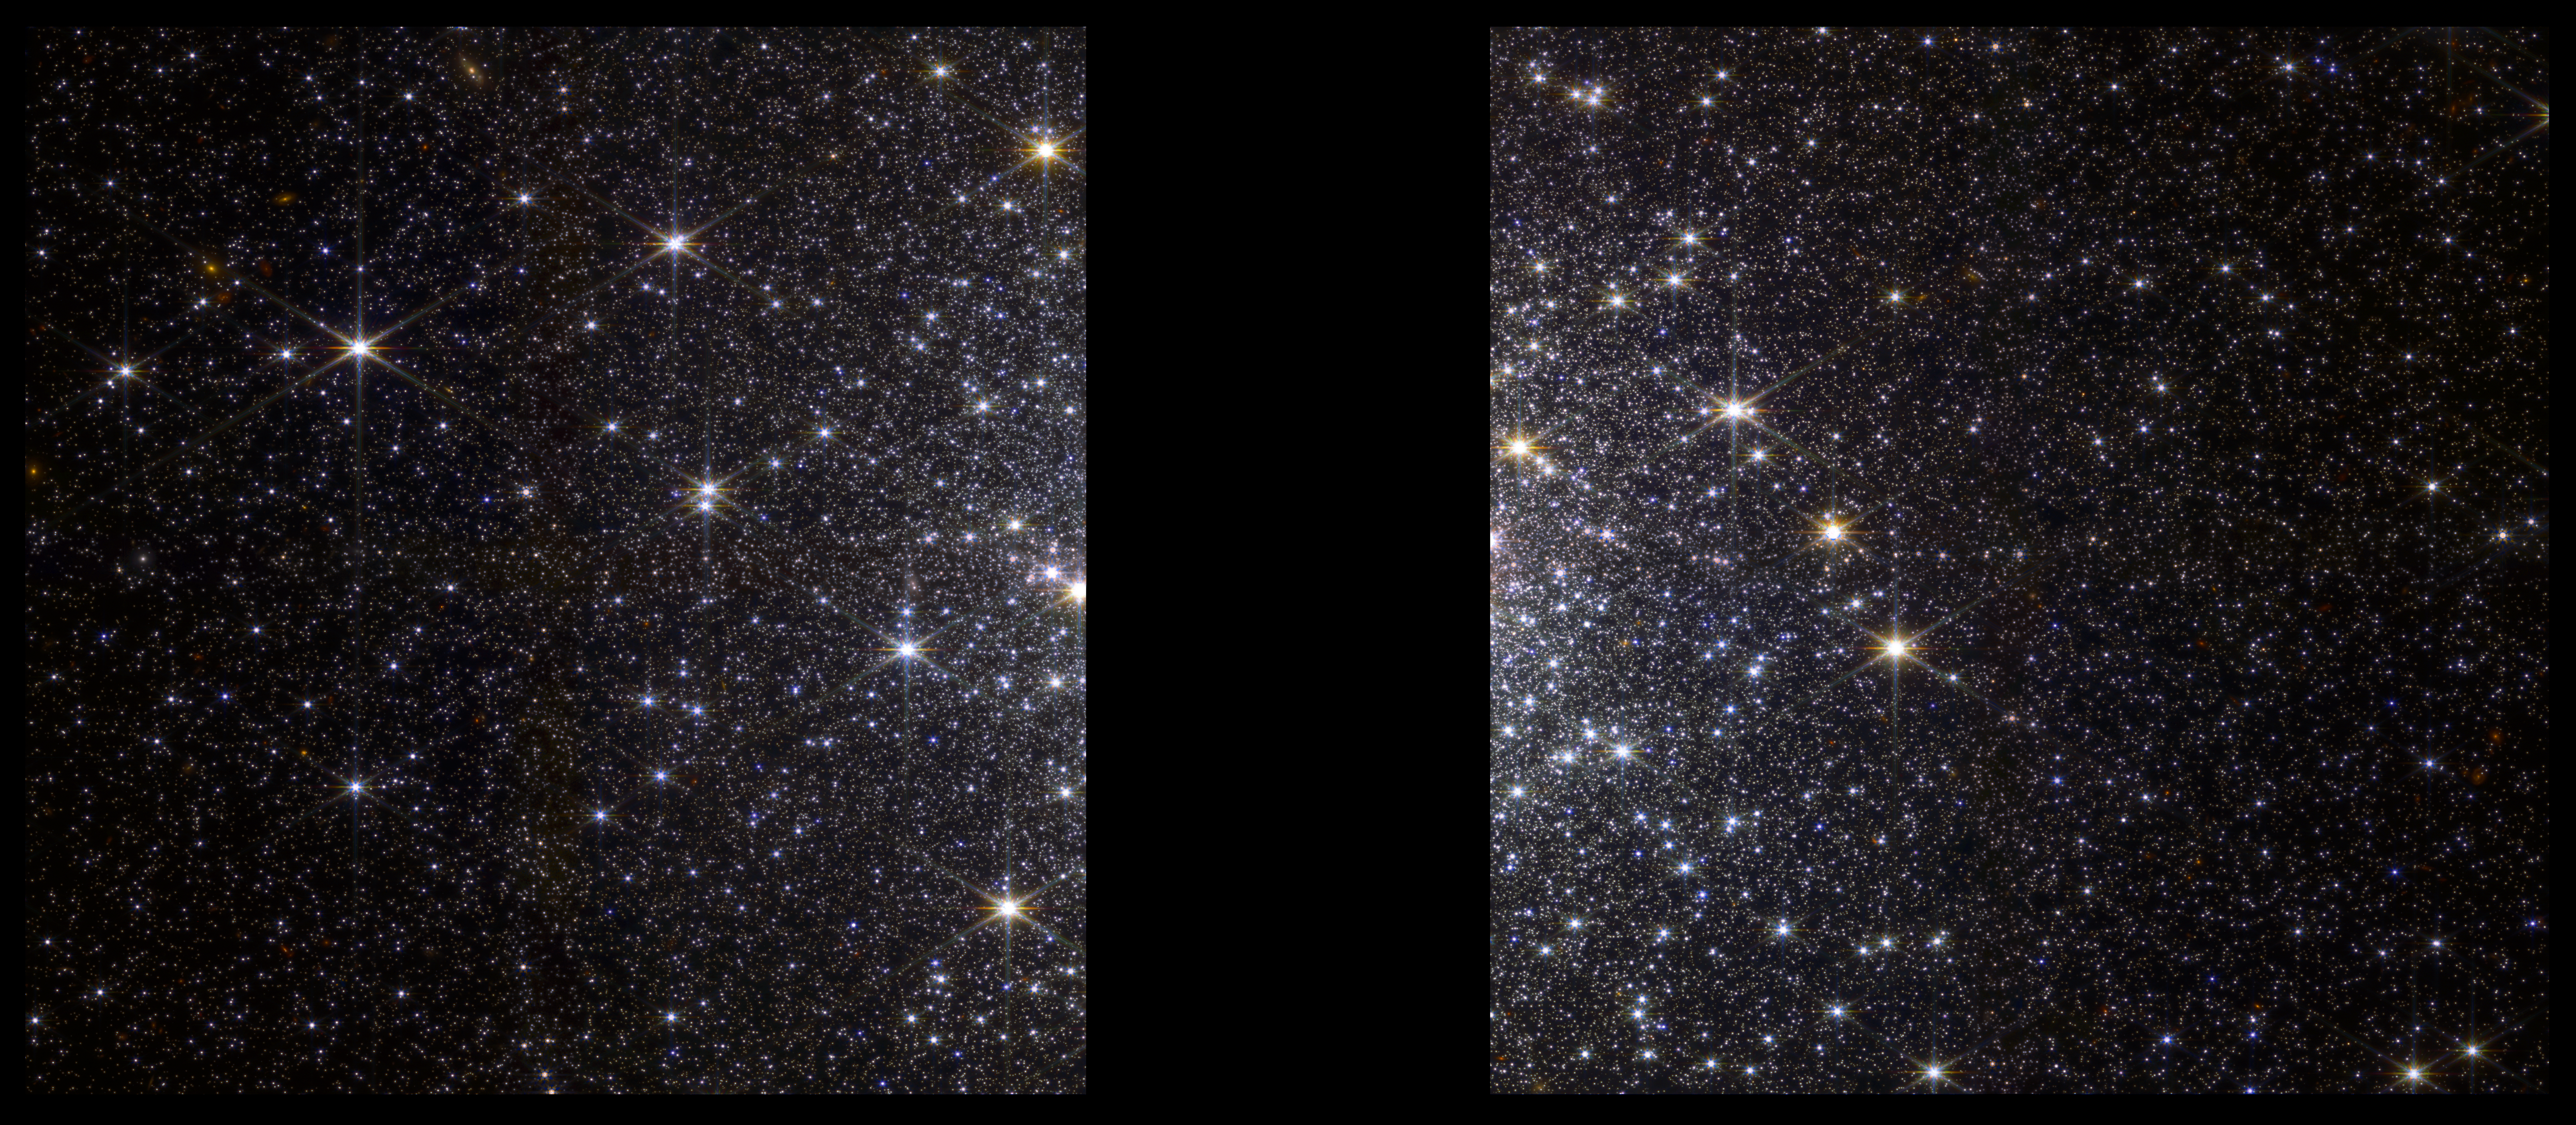

Webb Observes a Globular Cluster Sparkling with Separate Stars

On 20 June 2022, the NASA/ESA/CSA James Webb Space Telescope spent just over one hour observing Messier 92 (M92), a globular cluster 27,000 light-years away in the Milky Way halo. The observation – among the very first science observations undertaken by Webb – is part of Early Release Science (ERS) program 1334, one of 13 ERS programs designed to help astronomers understand how to use Webb and make the most of its scientific capabilities.

This image of the globular cluster M92 was captured by Webb’s NIRCam instrument. Globular clusters are dense masses of tightly packed stars that all formed around the same time. In M92, there are about 300,000 stars packed into a ball about 100 light-years across. The night sky of a planet in the middle of M92 would shine with thousands of stars that appear thousands of times brighter than those in our own sky. The image shows stars at different distances from the center, which helps astronomers understand the motion of stars in the cluster, and the physics of that motion.

The black strip in the center is a chip gap, the result of the separation between two long-wavelength detectors of Webb's NIRCam instrument. The gap covers the dense center of the cluster, which is too bright to capture at the same time as the fainter, less dense outskirts of the cluster.

This image is a composite of four exposures using four different filters: F090W (0.9 microns in wavelength) is shown in blue; F150W (1.5 microns) in cyan; F277W (2.77 microns) in yellow; and F444W (4.44 microns) in red. The image is about 5 arcminutes (39 light-years) across.

Credit: NASA, ESA, CSA, A. Pagan (STScI)